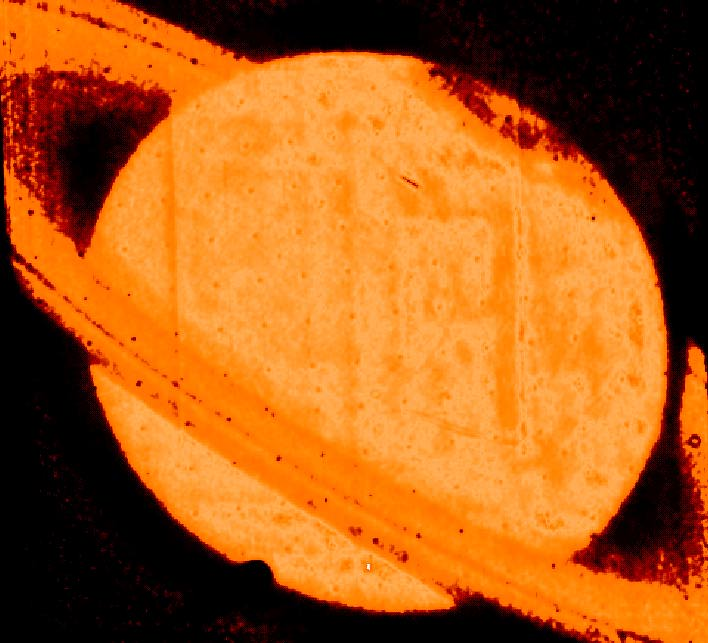

Discovery of a Dark Auroral Oval on Saturn

The ultraviolet image was obtained by the NASA/ESA Hubble Space Telescope with the European Faint Object Camera (FOC) on June 1992. It represents the sunlight reflected by the planet in the near UV (220 nm).

The image reveals a dark oval encircling the north magnetic pole of Saturn. This auroral oval is the first ever observed for Saturn, and its darkness is unique in the solar system (L. Ben-Jaffel, V. Leers, B. Sandel, Science, Vol. 269, p. 951, August 18, 1995). The structure represents an excess of absorption of the sunlight at 220 nm by atmospheric particles that are the product of the auroral activity itself. The large tilt of the northern pole of Saturn at the time of observation, and the almost perfect symmetry of the planet's magnetic field, made this observation unique as even the far side of the dark oval across the pole is visible!

Credit: L. Ben Jaffel, Institut d'Astrophysique de Paris-CNRS, France, B. Sandel (Univ. of Arizona), NASA/ESA, and Science (magazine).